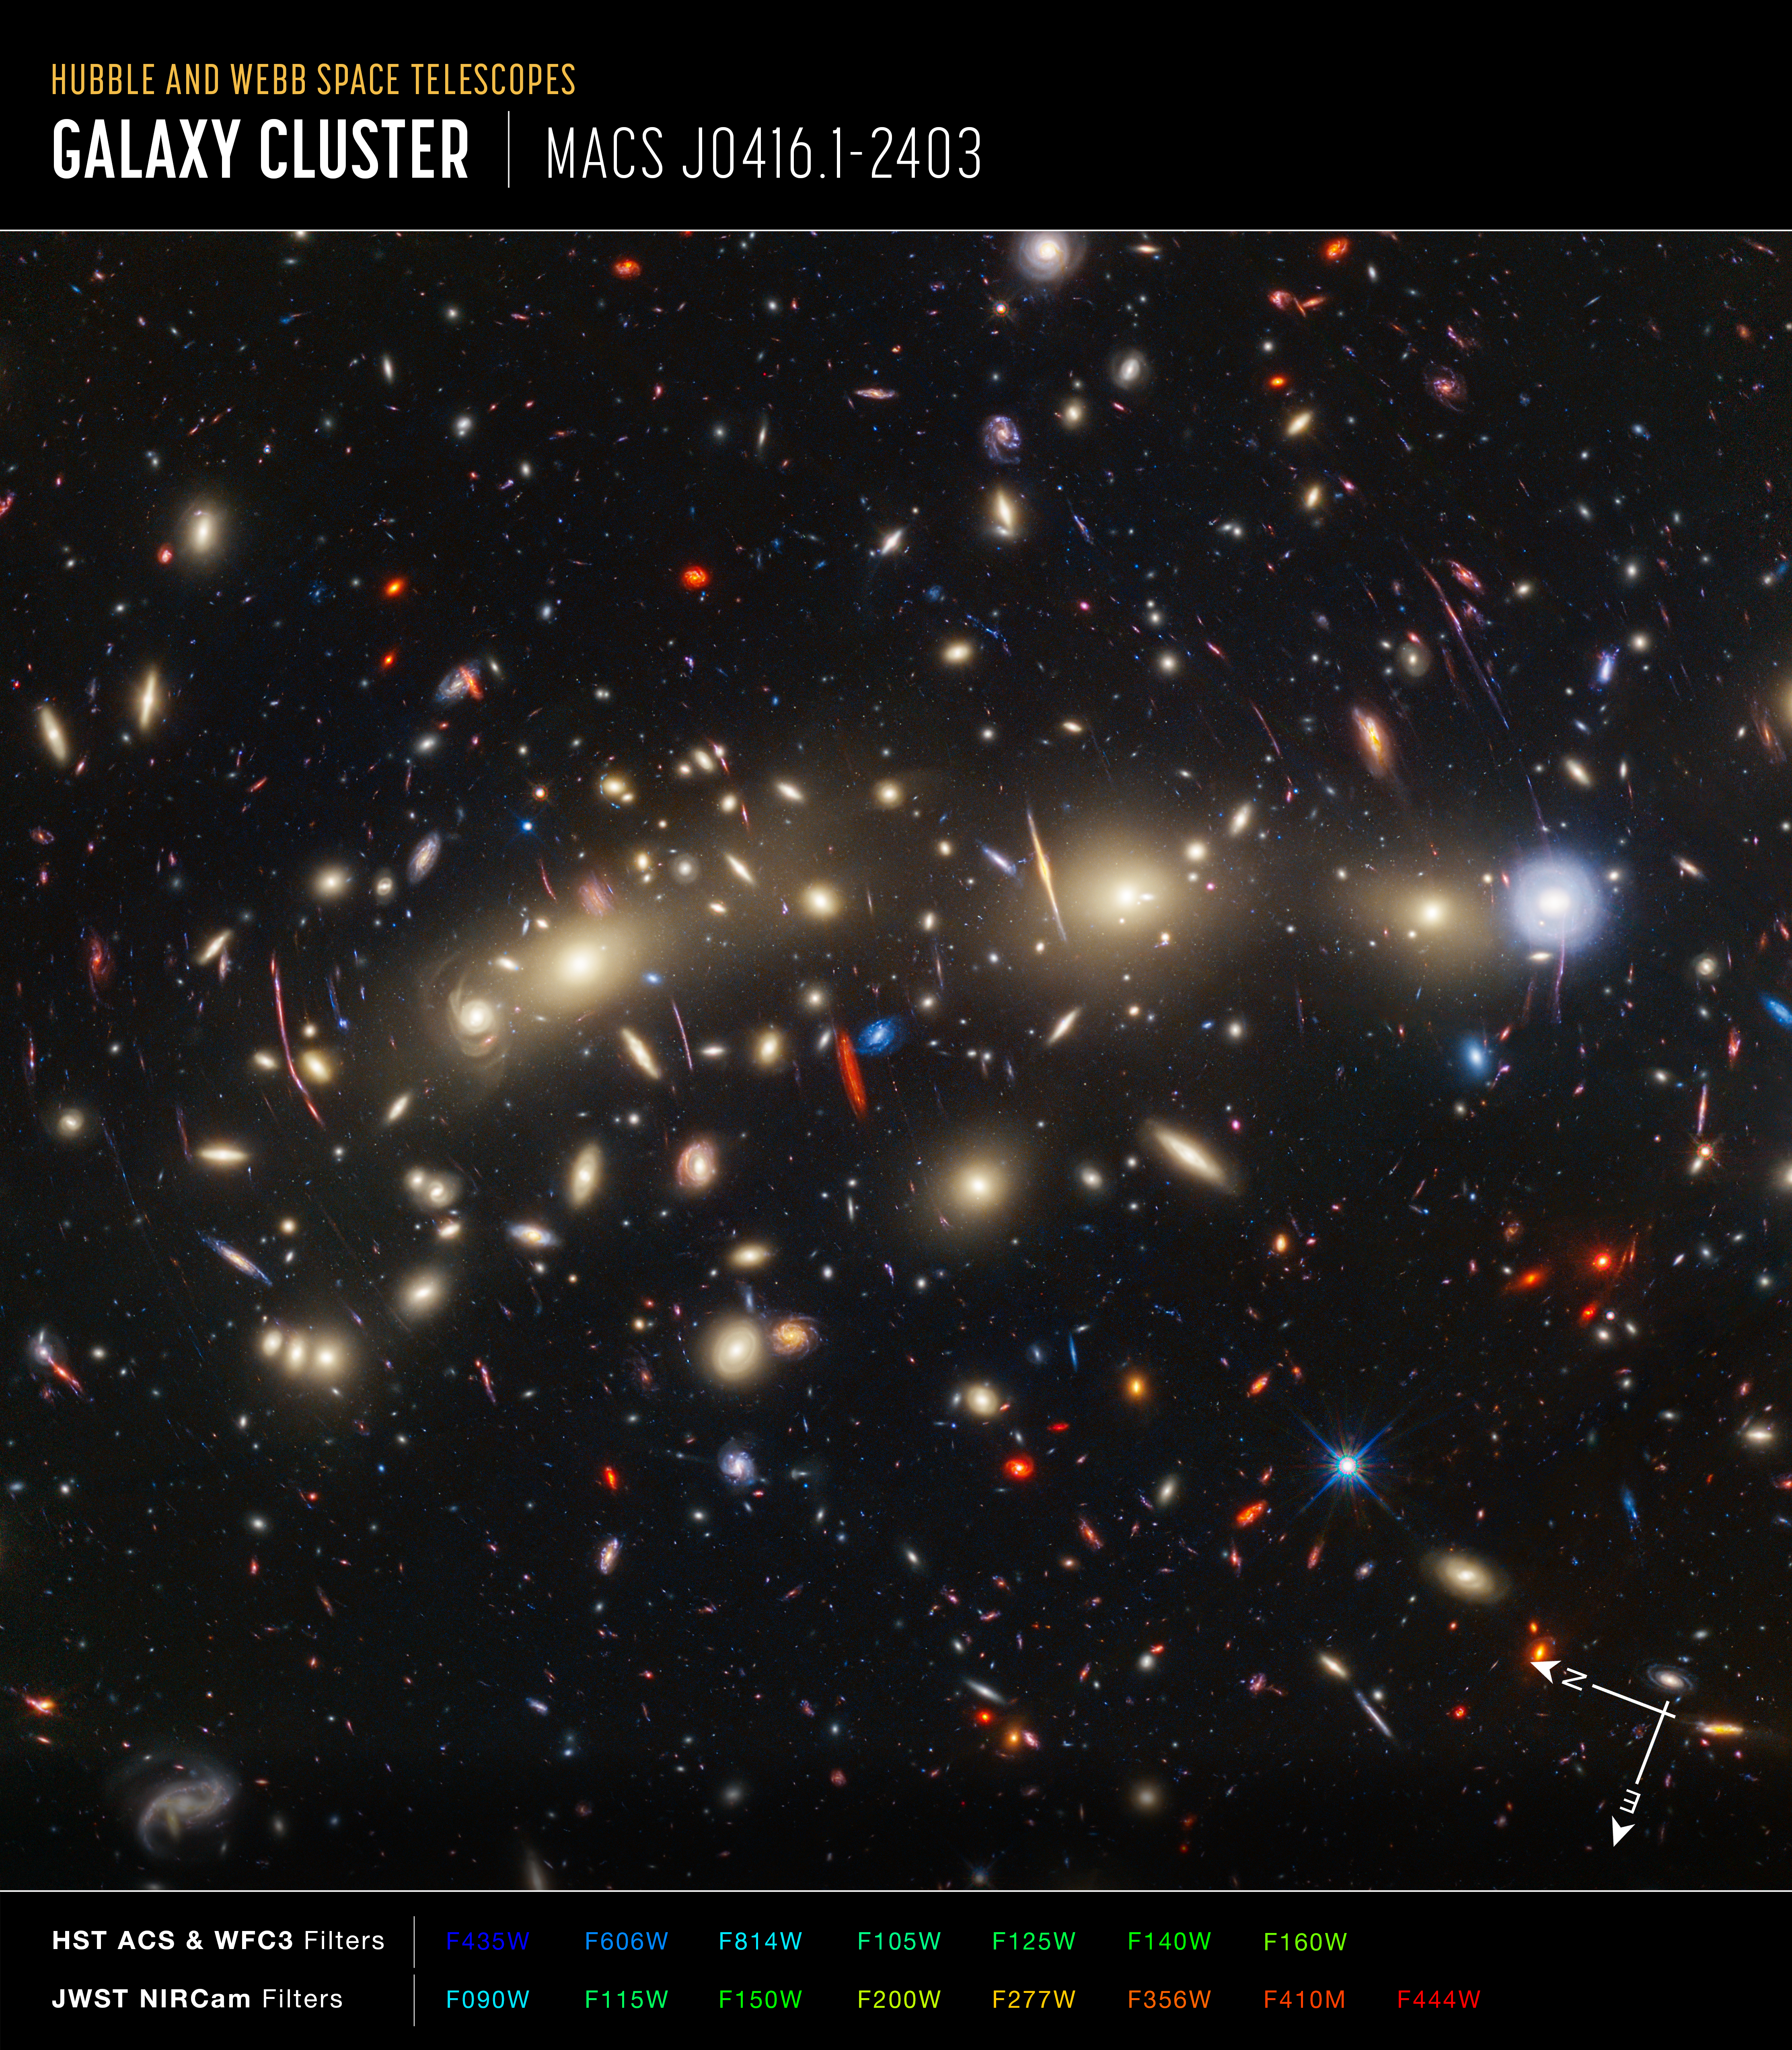

Galaxy cluster MACS0416 (Hubble and Webb composite image, annotated)

This panchromatic view of galaxy cluster MACS0416 was created by combining infrared observations from the NASA/ESA/CSA James Webb Space Telescope with visible-light data from the NASA/ESA Hubble Space Telescope. To make the image, in general the shortest wavelengths of light were colour-coded blue, the longest wavelengths red, and intermediate wavelengths green. The resulting wavelength coverage, from 0.4 to 5 microns, reveals a vivid landscape of galaxies that could be described as one of the most colourful views of the universe ever created.

MACS0416 is a galaxy cluster located about 4.3 billion light-years from Earth, meaning that the light from it that we see now left the cluster shortly after the formation of our Solar System. This cluster magnifies the light from more distant background galaxies through gravitational lensing. As a result, the research team has been able to identify magnified supernovae and even very highly magnified individual stars.

Those colours give clues to galaxy distances: the bluest galaxies are relatively nearby and often show intense star formation, as best detected by Hubble, while the redder galaxies tend to be more distant, or else contain copious amounts of dust, as best detected by Webb. The image reveals a wealth of details that it is only possible to capture by combining the power of both space telescopes.

In this image, blue represents data at wavelengths of 0.435, 0.606, 0.814, and 1.05 microns (Hubble filters F435W, F606W, F814W, and F105W). Green combines data at 0.90, 1.15, 1.5, 1.6, 2.0, and 2.77 microns (Hubble filter F160W and Webb filters F090W, F115W, F150W, F200W, and F277W). Red represents data at 3.56, 4.1, and 4.44 microns (Webb filters F356W, F410M and F444W).

Credit: NASA, ESA, CSA, STScI, J. Diego (Instituto de Física de Cantabria, Spain), J. D’Silva (U. Western Australia), A. Koekemoer (STScI), J. Summers & R. Windhorst (ASU), and H. Yan (U. Missouri)